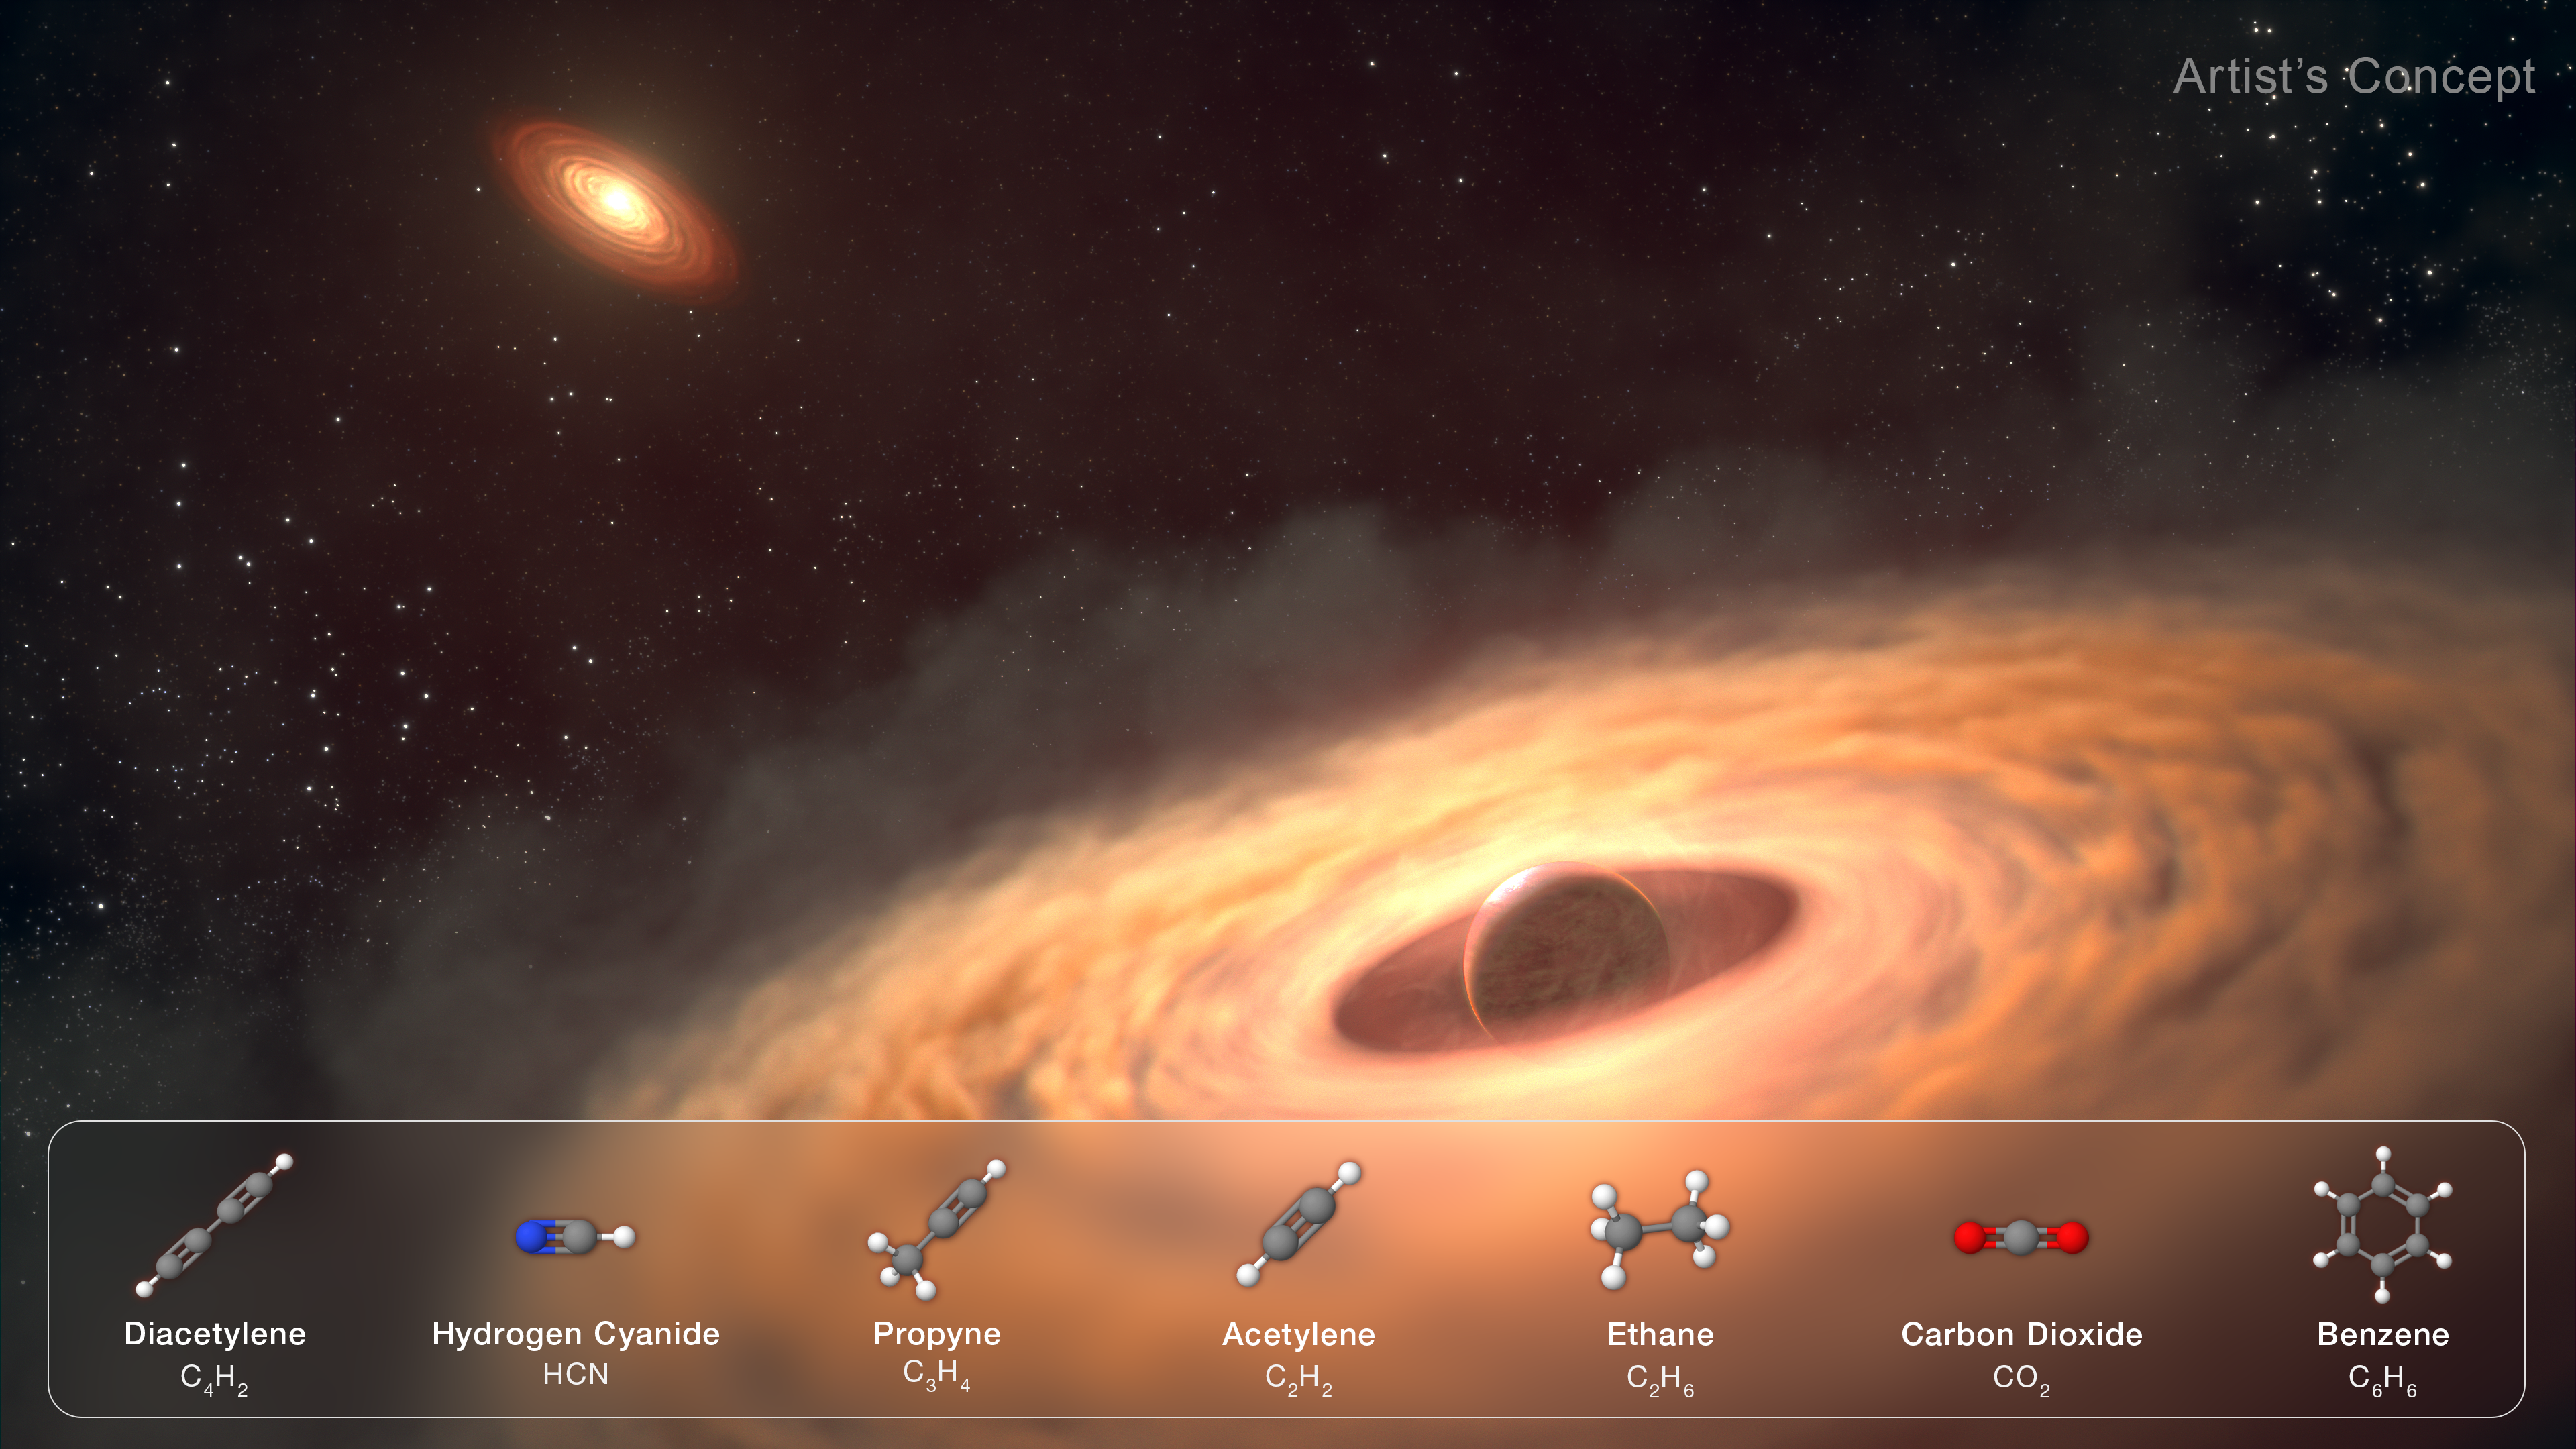

Illustration of moon-forming disc

An artistic rendering of a dust and gas disc encircling the young exoplanet, CT Cha b, 625 light-years from Earth. Spectroscopic data from the NASA/ESA/CSA James Webb Space Telescope suggest the disc contains the raw materials for moon formation. The planet appears at lower right, while its host star and surrounding protoplanetary disc are visible in the background.

Credit: NASA, ESA, CSA, STScI, G. Cugno (University of Zürich, NCCR PlanetS), S. Grant (Carnegie Institution for Science), J, Olmsted (STScI), L. Hustak (STScI)